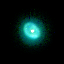

SMP 4 in the Large Magellanic Cloud

In the pictures of the planetary nebulae, colour corresponds to temperature. Blue represents hotter regions of the nebulae and red, cooler. Scientists are probing these illuminated stellar relics in our neighboring galaxy because they are at relatively the same distance - about 168, 000 light-years -- from Earth. Knowing the distance to these objects allows scientists to compare their shapes and sizes, and precisely determine the brightness of their central stars. For this reason, even though these glowing remains of dying stars are about 50 times farther away than the stunning planetary nebulae photographed in the Milky Way, they are of invaluable importance.

Credit: NASA/ESA; L. Stanghellini, R. Shaw, C. Blades, and M. Mutchler, Space Telescope Science Institute, Baltimore, Md.; and B. Balick, University of Washington, Seattle.